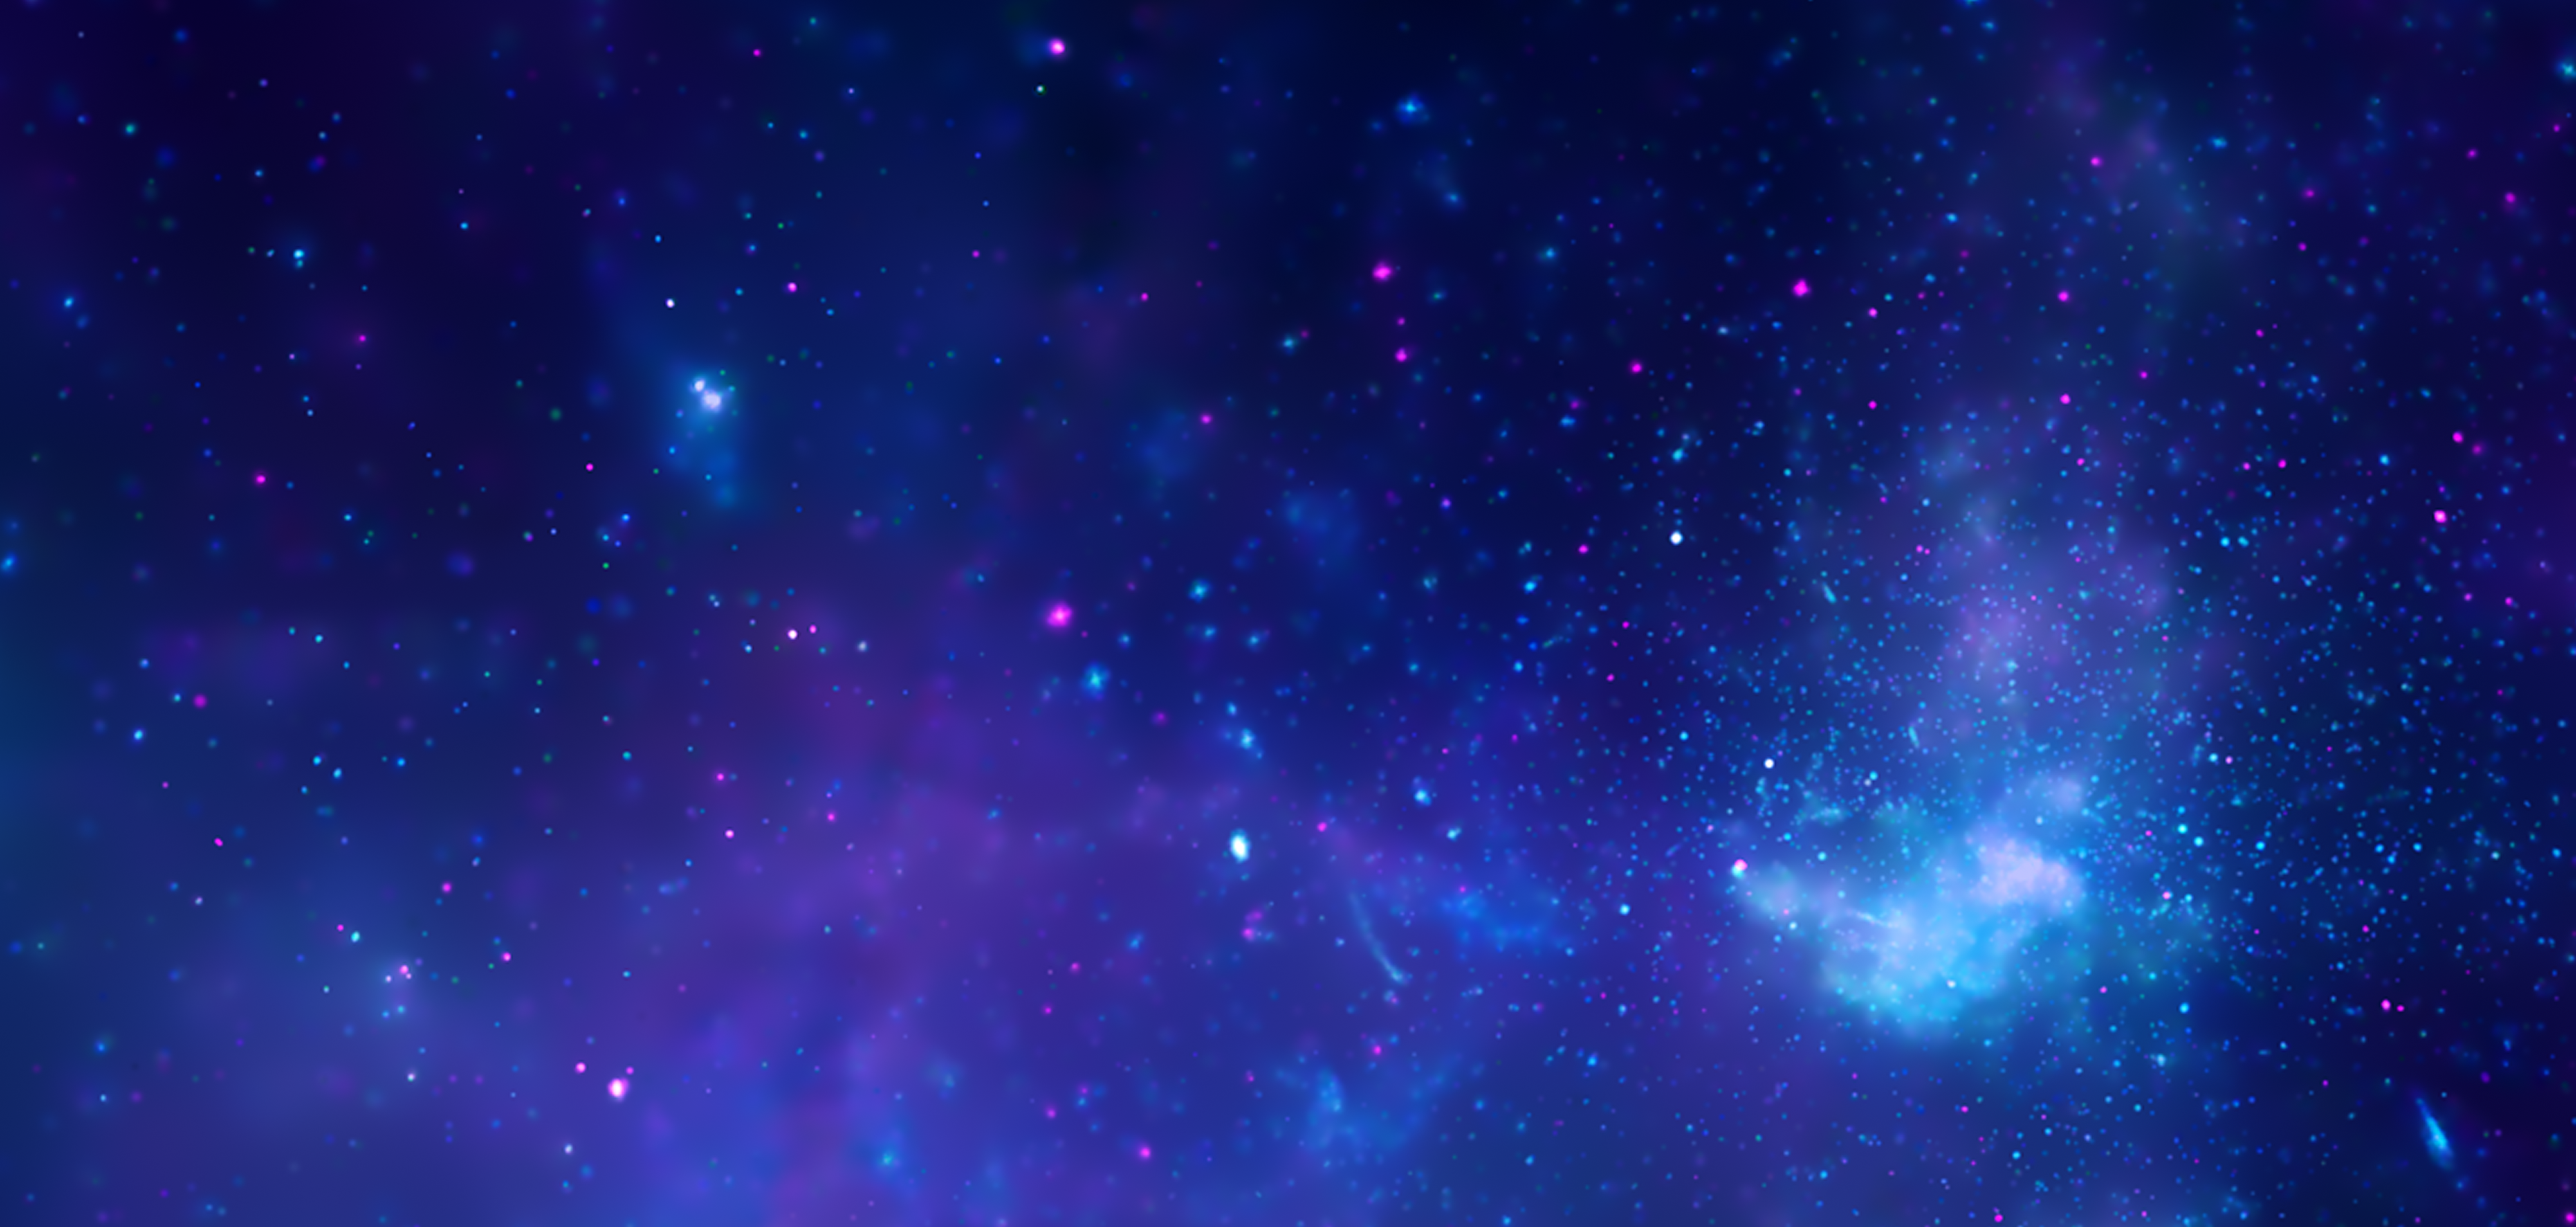

Galactic centre region in X-rays from Chandra

X-rays detected by the Chandra X-ray Observatory expose a wealth of exotic objects and high-energy features. In this image, pink represents lower energy X-rays and blue indicates higher energy. Hundreds of small dots show emission from material around black holes and other dense stellar objects. A supermassive black hole – some four million times more massive than the Sun – resides within the bright region in the lower right. The diffuse X-ray light comes from gas heated to millions of degrees by outflows from the supermassive black hole, winds from giant stars, and stellar explosions. This central region is the most energetic place in our galaxy.

Credit: NASA, CXC, D. Wang (University of Massachusetts, Amherst, USA) and STScI